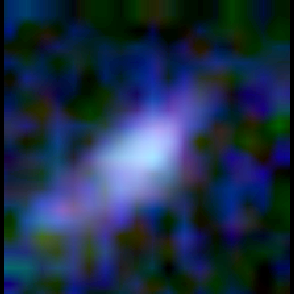

Galaxy building blocks

This is one Proto Galaxy out of a series of 18, taken by the Wide Field Planetary Camera 2.

Credit: Rogier Windhorst and Sam Pascarelle (Arizona State University) and NASA/ESA